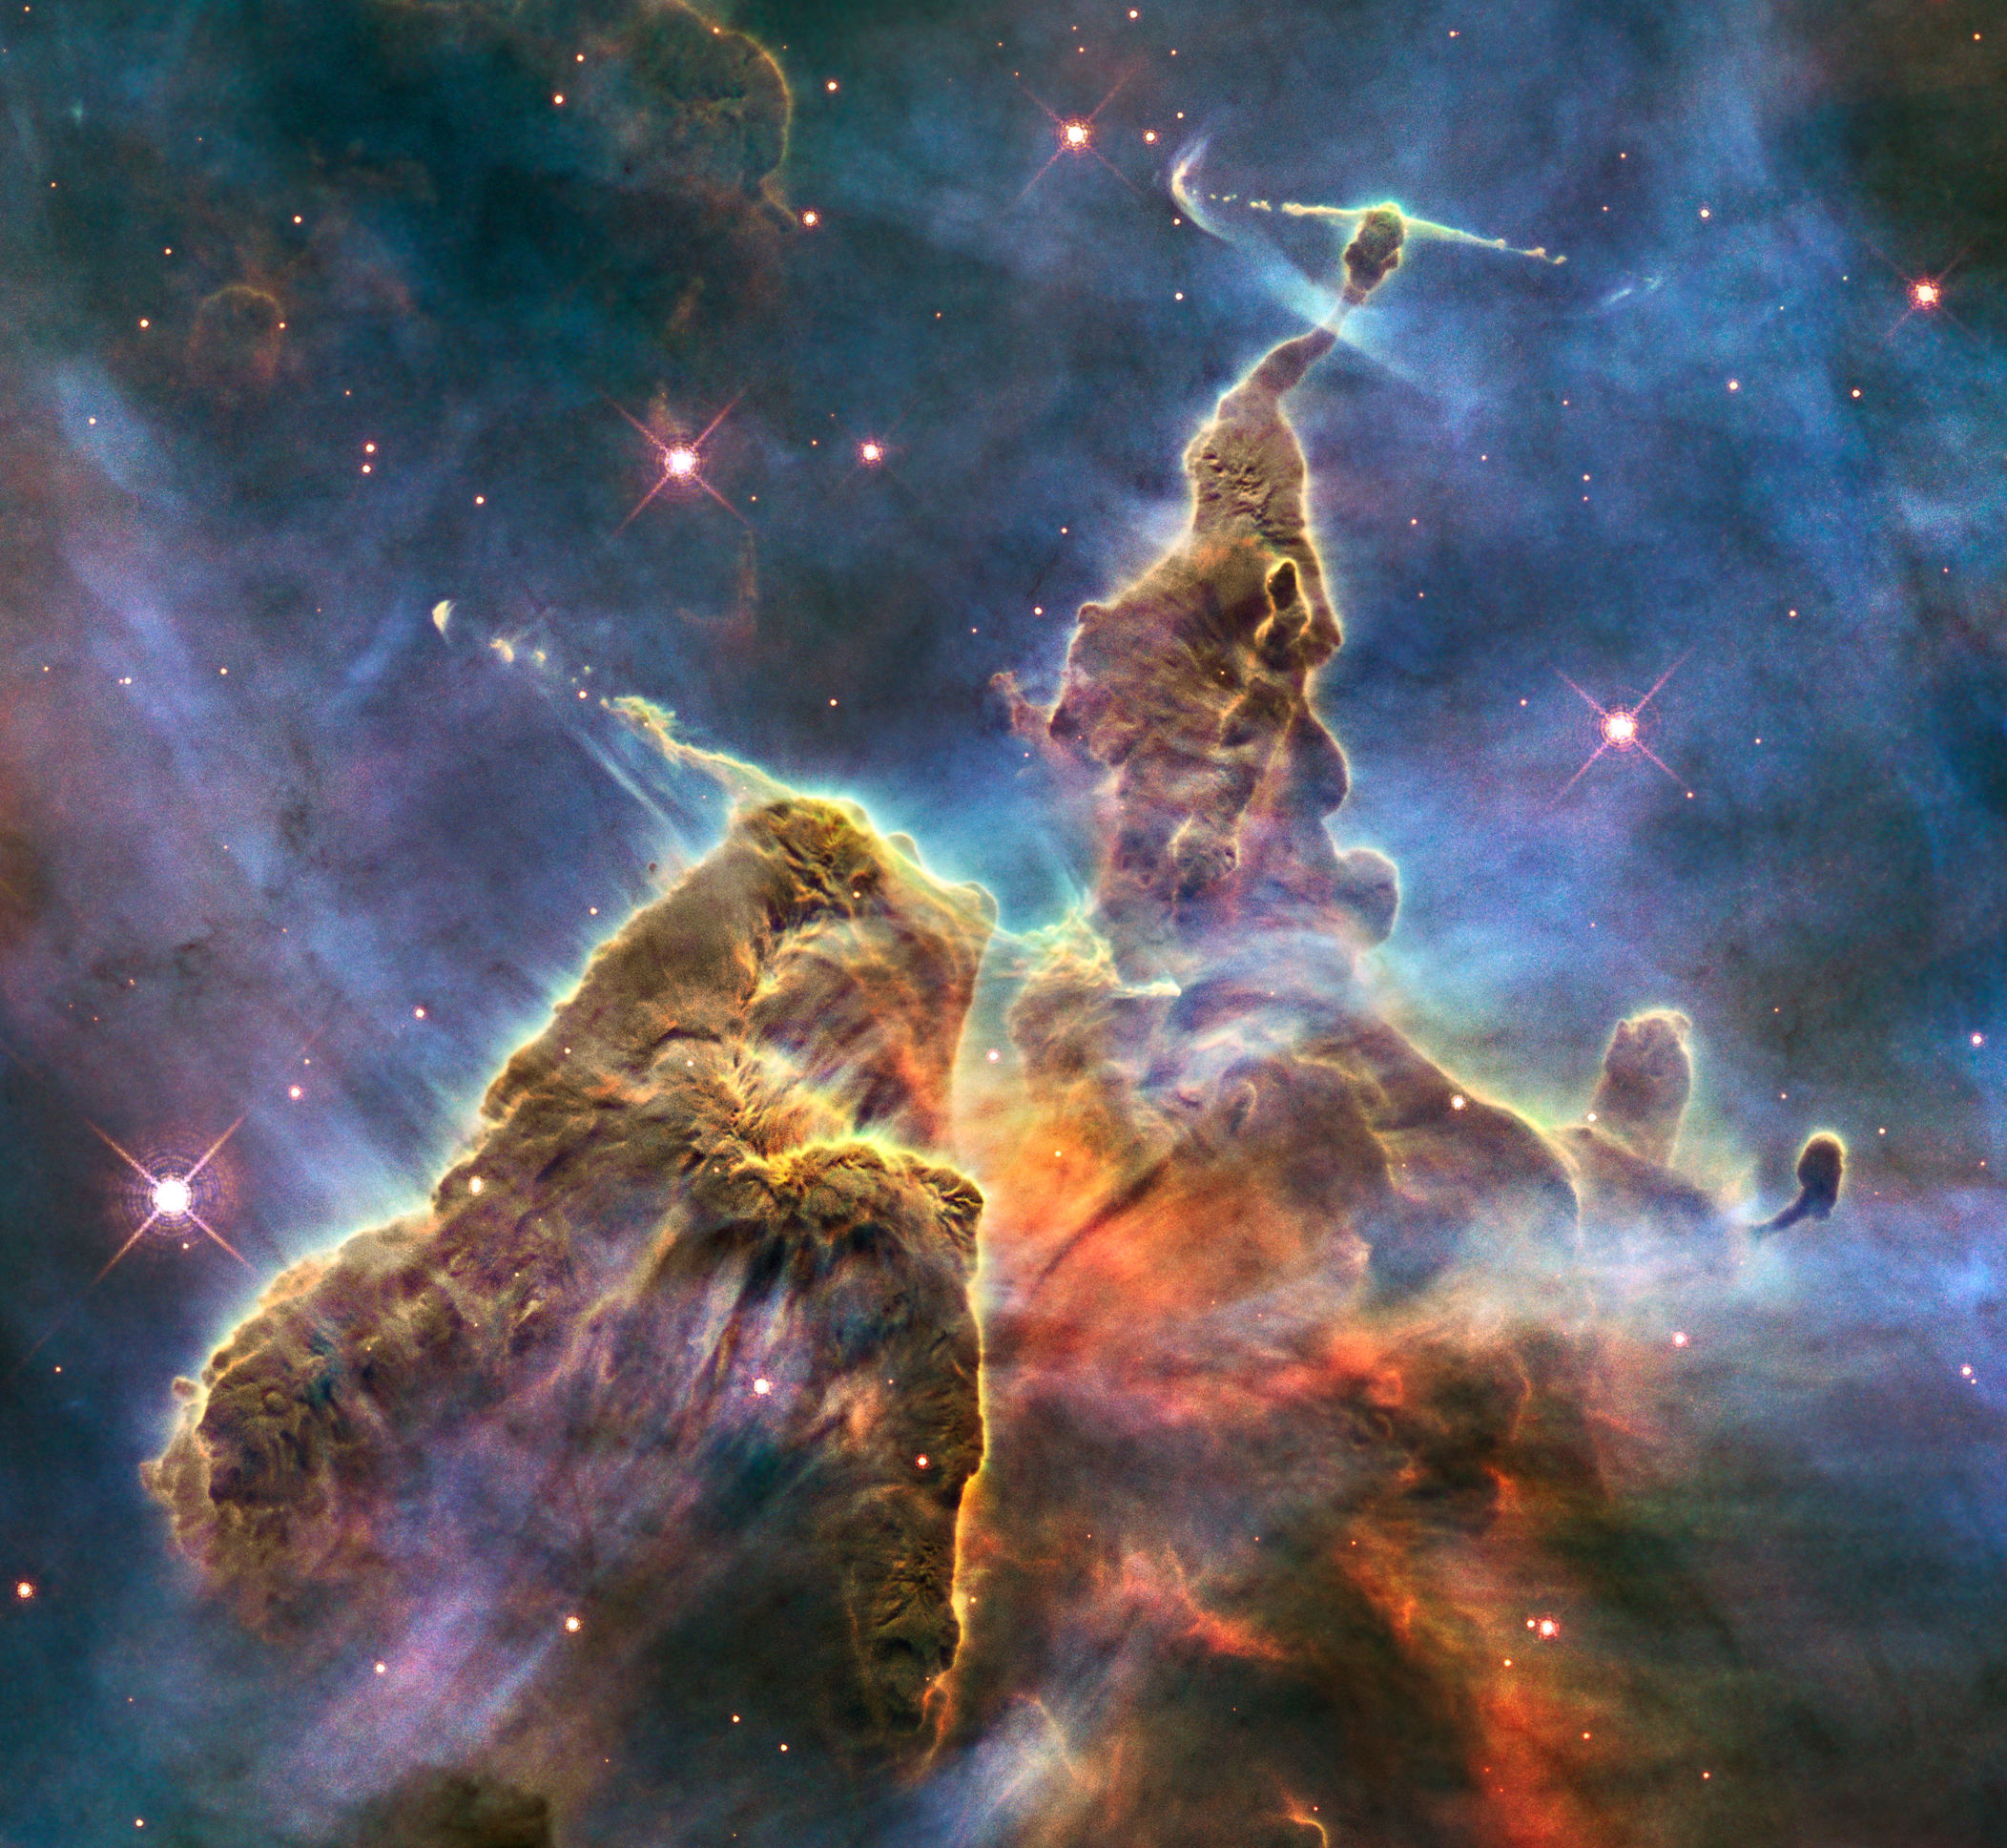

Hubble captures view of “Mystic Mountain”

This craggy fantasy mountaintop enshrouded by wispy clouds looks like a bizarre landscape from Tolkien’s The Lord of the Rings. The NASA/ESA Hubble Space Telescope image, which is even more dramatic than fiction, captures the chaotic activity atop a pillar of gas and dust, three light-years tall, which is being eaten away by the brilliant light from nearby bright stars. The pillar is also being assaulted from within, as infant stars buried inside it fire off jets of gas that can be seen streaming from towering peaks.

This turbulent cosmic pinnacle lies within a tempestuous stellar nursery called the Carina Nebula, located 7500 light-years away in the southern constellation of Carina. The image celebrates the 20th anniversary of Hubble's launch and deployment into an orbit around the Earth.

Scorching radiation and fast winds (streams of charged particles) from super-hot newborn stars in the nebula are shaping and compressing the pillar, causing new stars to form within it. Streamers of hot ionised gas can be seen flowing off the ridges of the structure, and wispy veils of gas and dust, illuminated by starlight, float around its towering peaks. The denser parts of the pillar are resisting being eroded by radiation.

Nestled inside this dense mountain are fledgling stars. Long streamers of gas can be seen shooting in opposite directions from the pedestal at the top of the image. Another pair of jets is visible at another peak near the centre of the image. These jets, (known as HH 901 and HH 902, respectively, are signposts for new star birth and are launched by swirling gas and dust discs around the young stars, which allow material to slowly accrete onto the stellar surfaces.

Hubble’s Wide Field Camera 3 observed the pillar on 1-2 February 2010. The colours in this composite image correspond to the glow of oxygen (blue), hydrogen and nitrogen (green), and sulphur (red).

Credit: NASA, ESA, M. Livio and the Hubble 20th Anniversary Team (STScI)